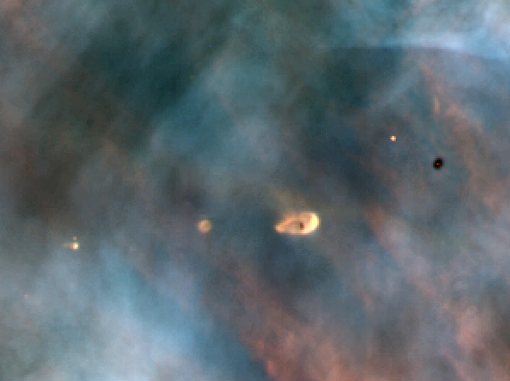

Proplyds

A Hubble Space Telescope view of a small portion of the Orion Nebula reveals five young stars. Four of the stars are surrounded by gas and dust trapped as the stars formed, but were left in orbit about the star. These are possibly protoplanetary disks, or 'proplyds', that might evolve on to agglomerate planets.

Credit: C.R. O'Dell/Rice University NASA/ESA